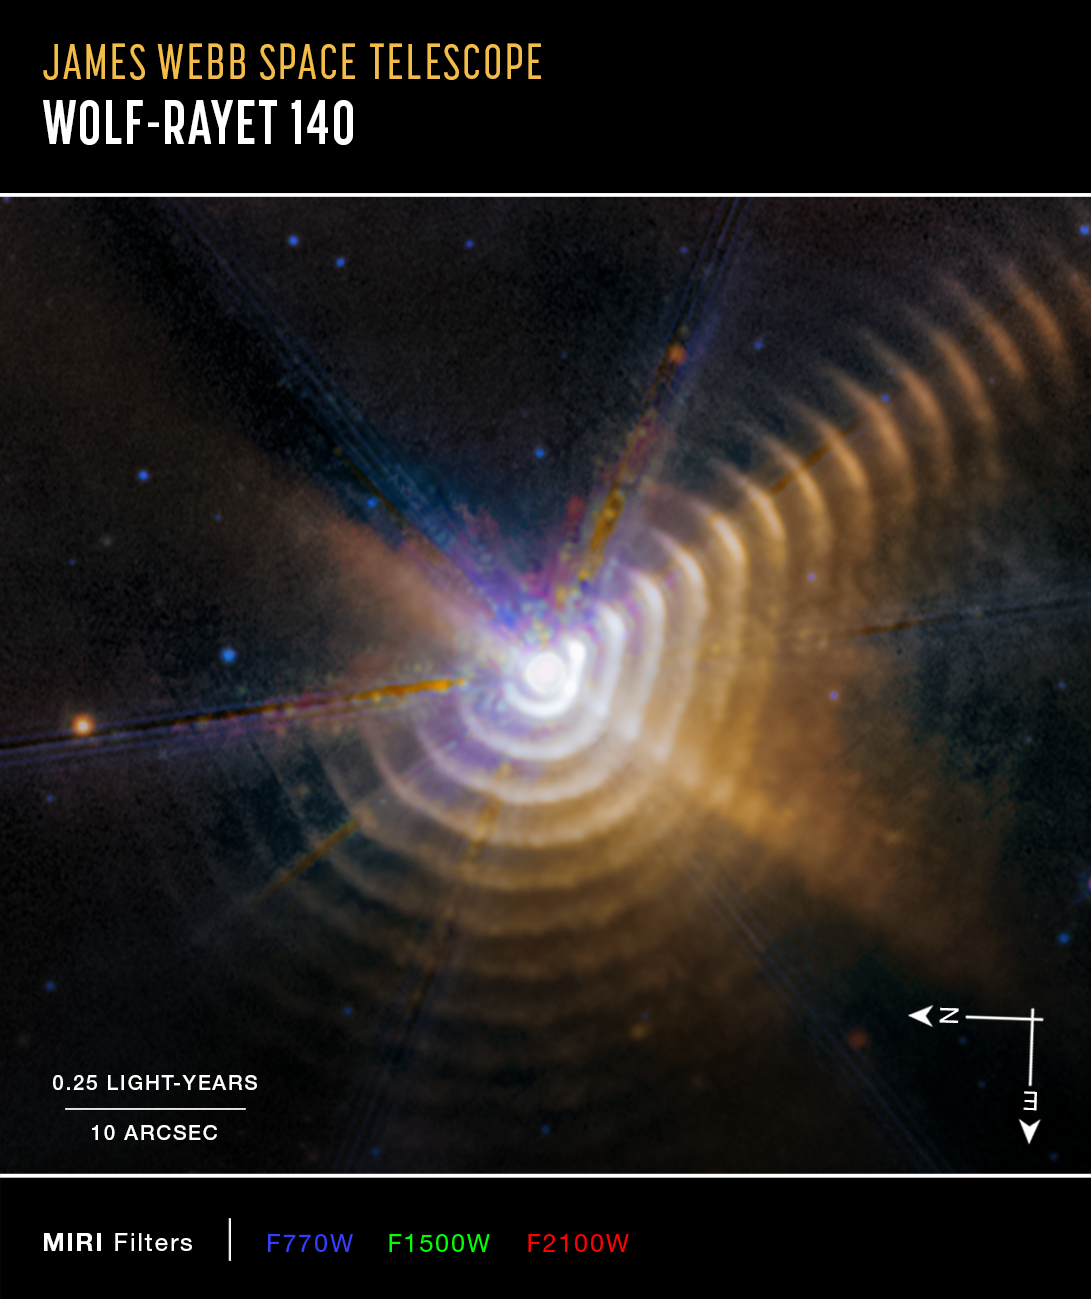

Wolf-Rayet 140 (MIRI image, annotated) - September 2023

Astronomers using the NASA/ESA/CSA James Webb Space Telescope have identified two stars responsible for generating carbon-rich dust a mere 5000 light-years away in our own Milky Way galaxy. As the massive stars in Wolf-Rayet 140 swing past one another on their elongated orbits, their winds collide and produce the carbon-rich dust. For a few months every eight years, the stars form a new shell of dust that expands outward — and may eventually go on to become part of stars that form elsewhere in our galaxy.

Every shell is racing away from the stars at more than 2600 kilometers per second, almost 1% the speed of light.

Wolf-Rayet 140 lies just over 5000 light-years away in our Milky Way galaxy.

Credit: NASA, ESA, CSA, STScI, E. Lieb (University of Denver), R. Lau (NSF NOIRLab), J. Hoffman (University of Denver)